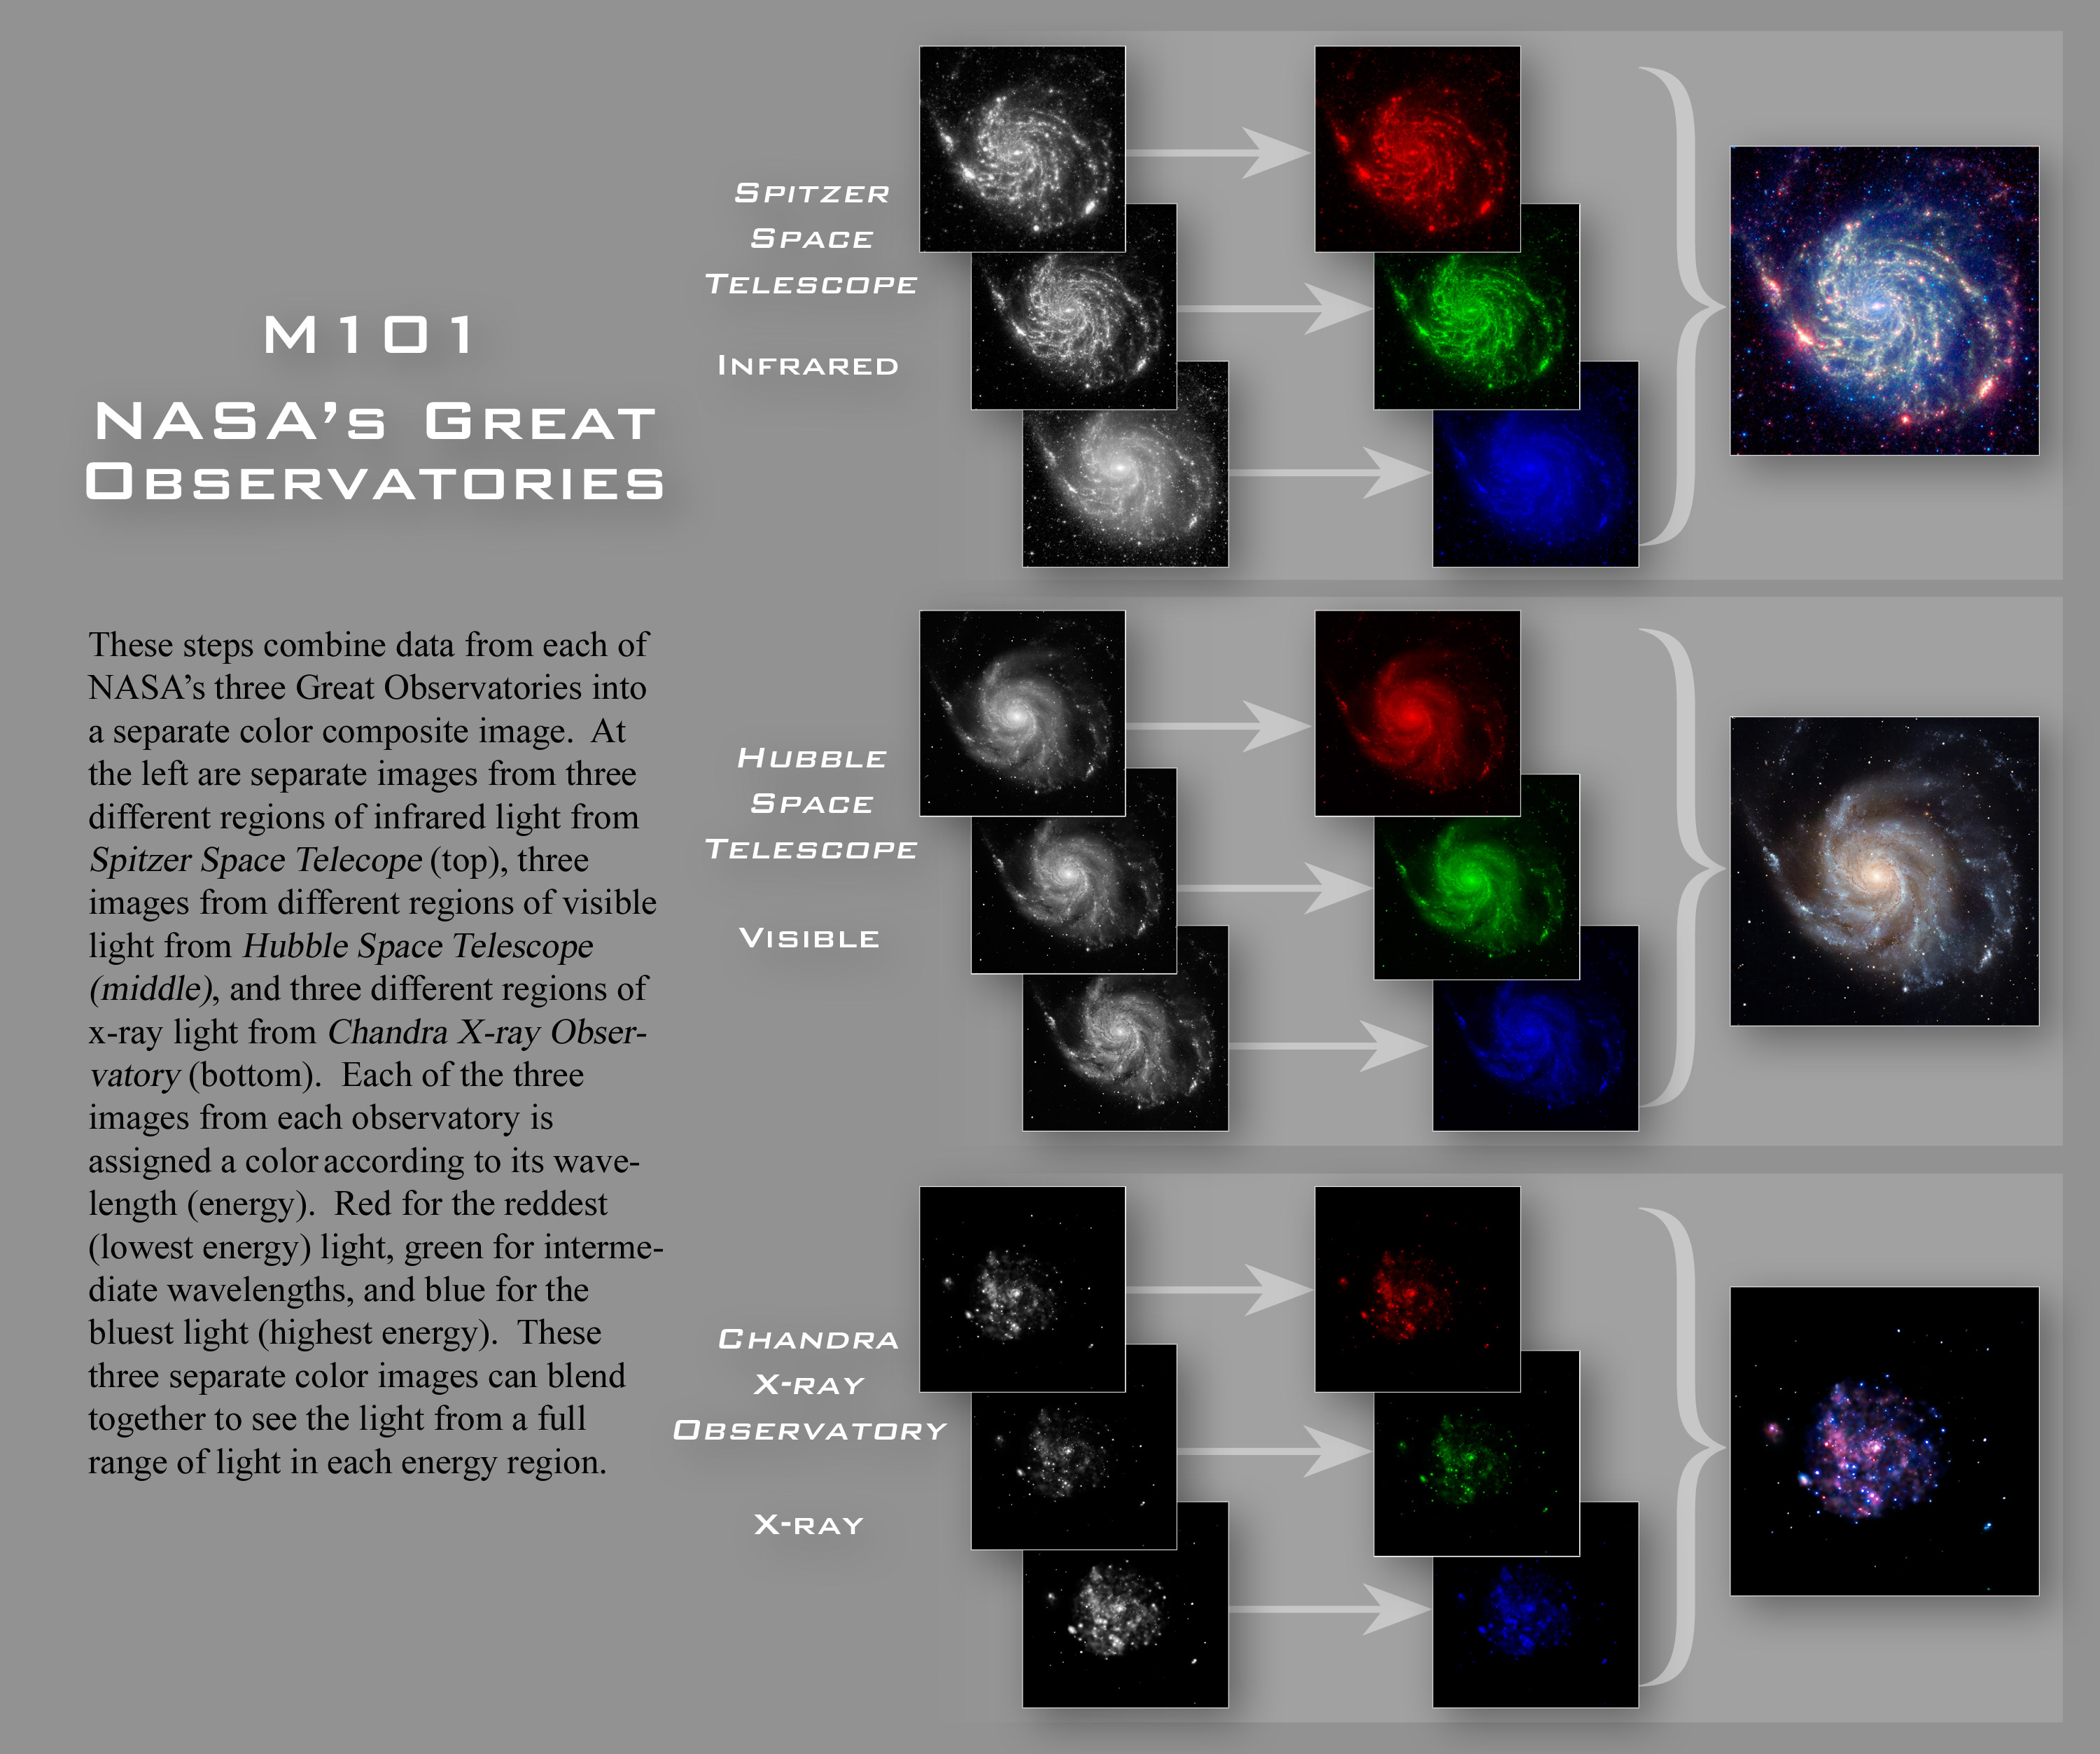

Construction of the individual Great Observatories M101 images

These steps combine data from each of NASA's three Great Observatories into a separate colour composite image. At the left are separate images from three different regions of infrared light from the Spitzer Space Telescope (top), three images from different regions of visible light from the Hubble Space Telescope (middle), and three different regions of X-ray light from the Chandra X-ray Observatory (bottom). Each of the three images from each observatory is assigned a colour according to its wavelength (energy). Red for the reddest (lowest energy) light, green for intermediate wavelengths, and blue for the bluest light (highest energy). These three separate colour images can blend together to see the light from a full range of light in each energy region.

Credit: NASA, ESA and Z. Levay (STScI)